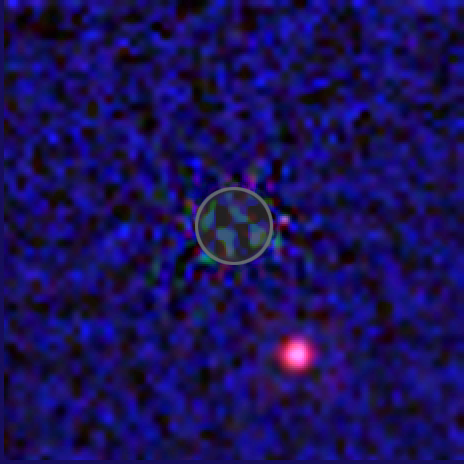

Hubble infrared view of extrasolar planet candidate

This is an artificial-colour Hubble Near Infrared Camera and Multi-Object Spectrometer (NICMOS) infrared-light view of the brown dwarf star 2MASSWJ 1207334-393254 (aka 2M1207) and giant planet companion candidate. The possible companion, estimated to be about five times the mass of Jupiter, is the magenta coloured spot at lower right. The brown dwarf's location is within the circle at image centre. The glare of the dwarf, which is 700 times brighter than the planet candidate (as seen at Hubble's near-infrared sensitivity) has been greatly reduced through image processing of NICMOS pictures taken at different Hubble orientations.

In this picture the dwarf and candidate planet are at a minimum distance of 8 billion kilometres apart. Further observations will be needed to confirm that the two objects are gravitationally bound. The red, green, and blue colours correspond to infrared wavelengths of (1.6, 1.1, and 0.9 microns respectively). At a temperature of only 1000 degrees Celsius, the candidate companion object appears very red in the NICMOS images.

Credit: NASA, ESA, G. Schneider (Steward Observatory, Univ. of Arizona, USA), I. Song (Gemini Observ.), B. Zuckerman, E. Becklin (Univ. of California, USA), P. Lowrance (California Inst. of Technology, USA), B. Macintosh (Lawrence Livermore National Laboratory, USA), M. Bessell (Australian National Univ.), and C. Dumas and G. Chauvin (European Southern Observatory)